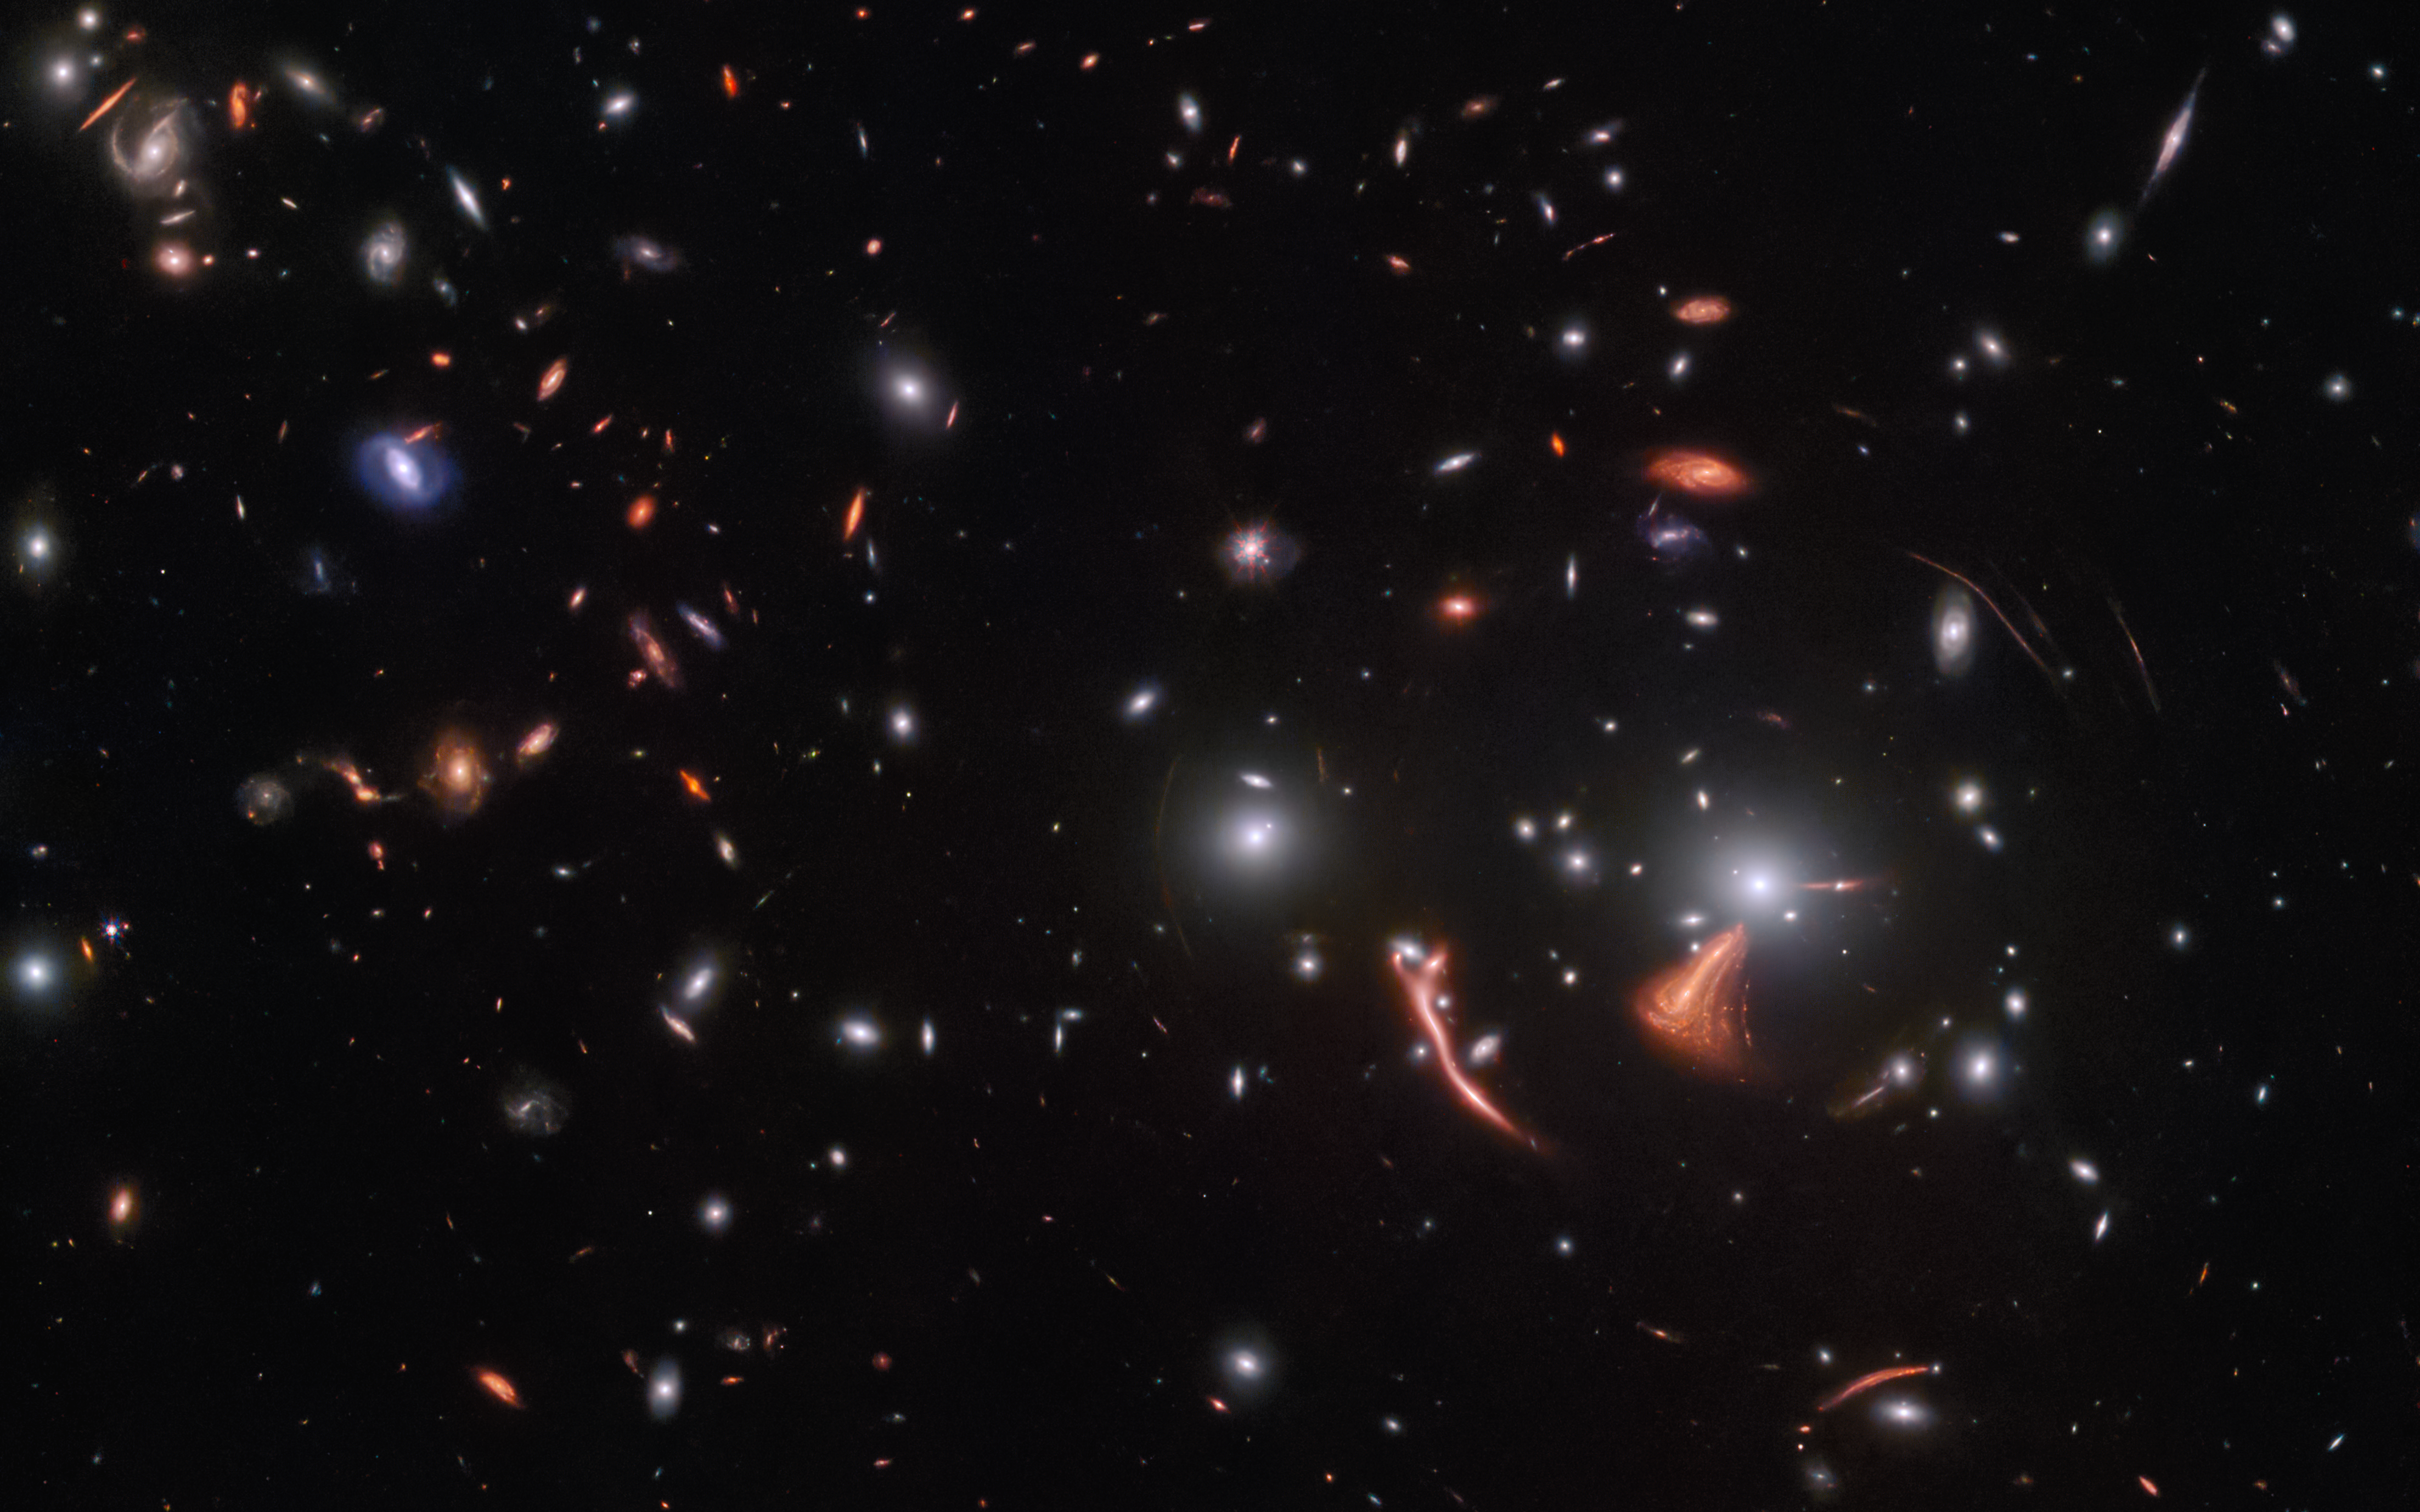

Cosmic seahorse

Streaks of light and bright arcs betray the presence of a vast gravitational lens in this image from the NASA/ESA/CSA James Webb Space Telescope. A galaxy cluster in the foreground has magnified distant galaxies, warping their shapes and creating the bright smears of light spread throughout this image. This effect, referred to by astronomers as gravitational lensing, occurs when a massive celestial object such as a galaxy cluster causes a sufficient curvature of spacetime for light to be visibly bent around it, as if by a gargantuan lens.

One of the consequential effects of gravitational lensing is that it can magnify distant astronomical objects, letting astronomers study objects that would otherwise be too faint or far away. This useful quirk of gravitational lensing has also been used to reveal some of the most distant galaxies humanity has ever encountered. The long, bright, and distorted arc spreading out near the core is one such example. A distant galaxy known as the Cosmic Seahorse, its brightness is greatly magnified by the gravitational lens, which has enabled astronomers to study star formation there.

This image was captured by NIRCam, Webb’s primary near-infrared camera, and contains the lensing galaxy cluster SDSS J1226+2149. It lies at a distance of around 6.3 billion light-years from Earth, in the constellation Coma Berenices. By combining Webb’s sensitivity with the magnifying effect of gravitational lensing, astronomers were able to use this gravitational lens to explore the earliest stages of star formation in distant galaxies. To do so, they relied on earlier studies by the NASA/ESA Hubble Space Telescope, which provided the ‘prescription’ for this gravitational lens.

This image shows only one observation from a programme designed to probe star formation in distant galaxies. As well as revealing how quickly stars form and characterising the environments in these galaxies that gave rise to new stars, these observations will demonstrate the capabilities of Webb and provide richly detailed datasets to the astronomical community. Astronomers expect Webb’s crystal-clear vision and cutting-edge instruments to provide new insights into star formation in distant, gravitationally lensed galaxies.

Credit: ESA/Webb, NASA & CSA, J. Rigby